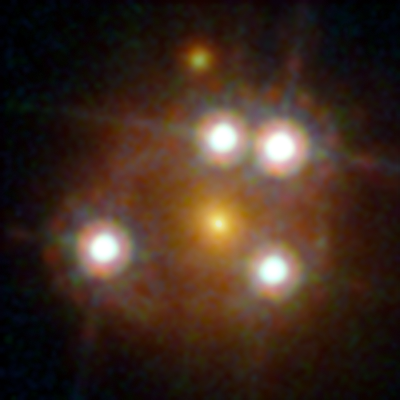

Lensed quasar

WFI2033-4723 is among the five best lensed quasars discovered to date. The foreground galaxy creates four distinct images of the distant quasar around it.

Credit: ESA/Hubble, NASA, Suyu et al.